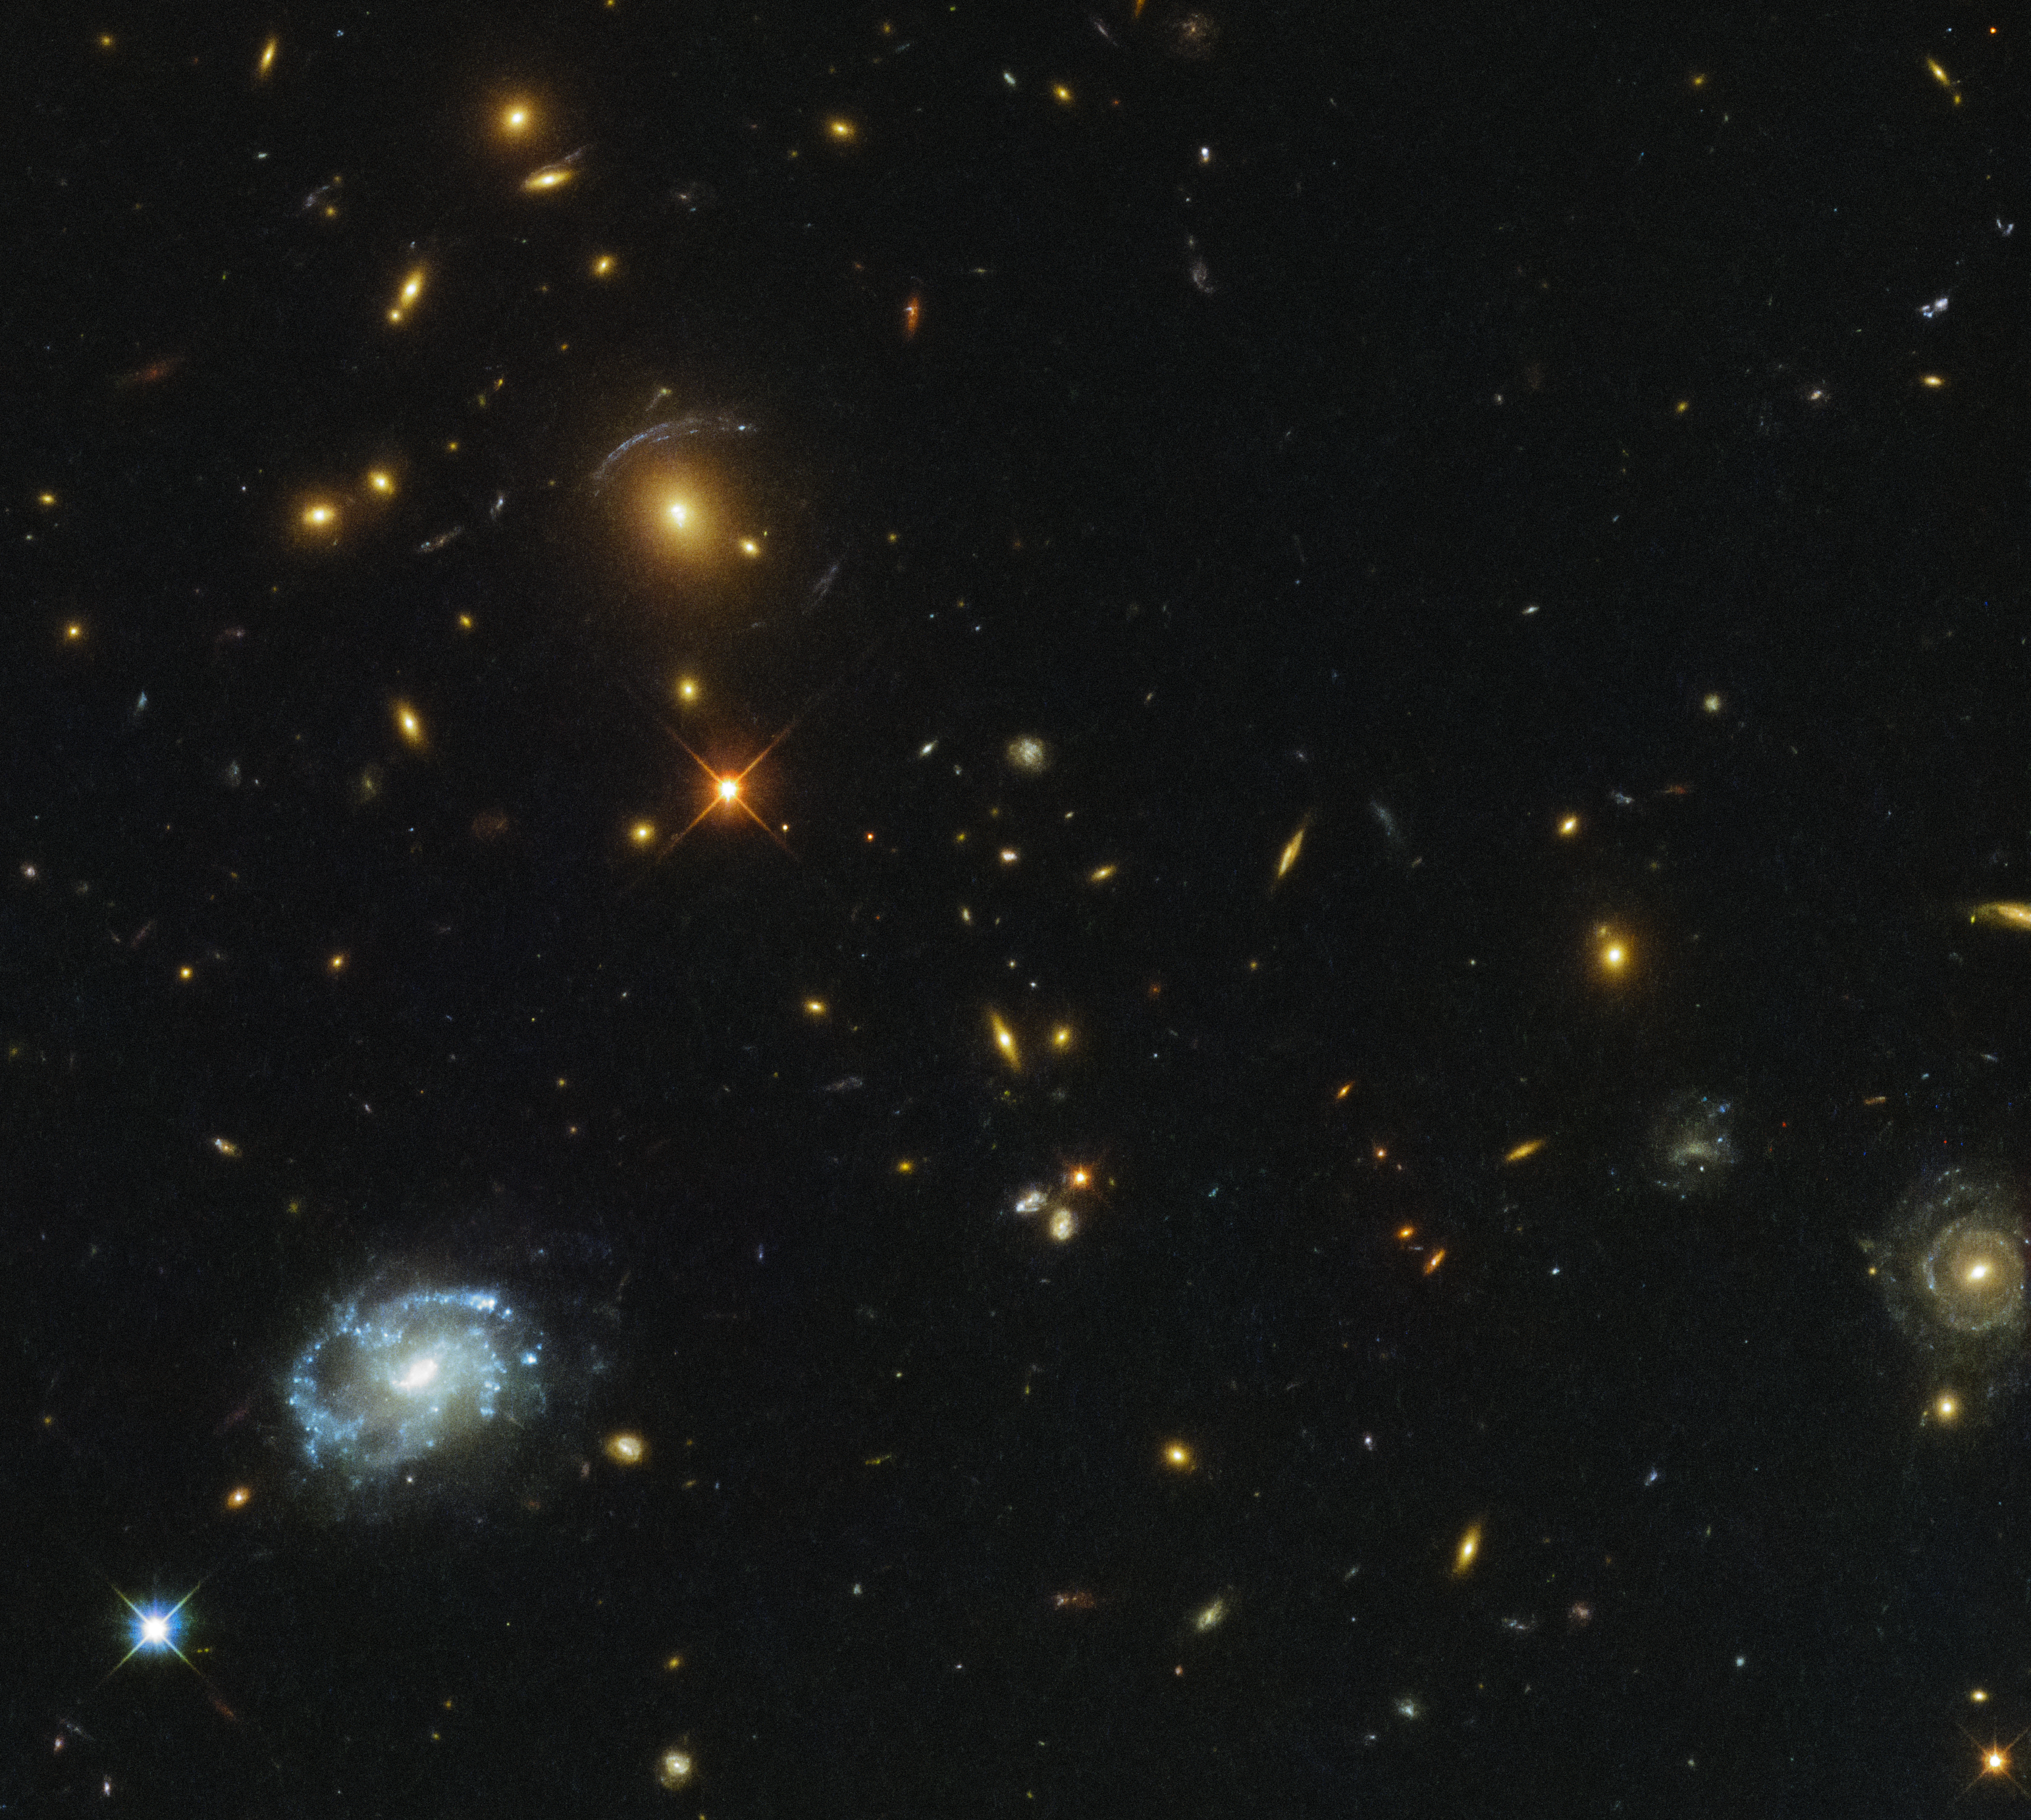

Monster in the deep

Though the bright, light-speckled foreground galaxy on the left is eye-catching, it is far from the most intriguing object in this NASA/ESA Hubble Space Telescope image. In the upper part of the frame, the light from distant galaxies has been smeared and twisted into odd shapes, arcs, and streaks. This phenomenon indicates the presence of a giant galaxy cluster, which is bending the light coming from the galaxies behind it with its monstrous gravitational influence.

This cluster, called SDSSJ0150+2725, lies some three billion light-years away and was first documented by the Sloan Digital Sky Survey (SDSS), hence its name. The SDSS uses a 2.5-metre optical telescope located at the Apache Point Observatory in New Mexico to observe millions of objects and create detailed 3D maps of the Universe. This particular cluster was part of the Sloan Giant Arcs Survey (SGAS), which detected galaxy clusters with strong lensing properties; their gravity stretches and warps the light of more distant galaxies sitting behind them, creating weird and spectacular arcs such as those seen here.

The Hubble data on of SDSSJ0150+2725 were part of a study of star formation in brightest cluster galaxies (called BCGs), lying between approximately 2 and 6 billion light-years away. This study found the star formation rate in these galaxies to be low, which is consistent with models that suggest that most stars in such galaxies form very early on. These BCGs also emit strong radio signals thought to be from active galactic nuclei (AGN) at their centers, suggesting that the activity from both the AGN and any ongoing star formation is fuelled by cold gas found within the host galaxies.

Credit: ESA/Hubble & NASA Acknowledgement: Judy Schmidt